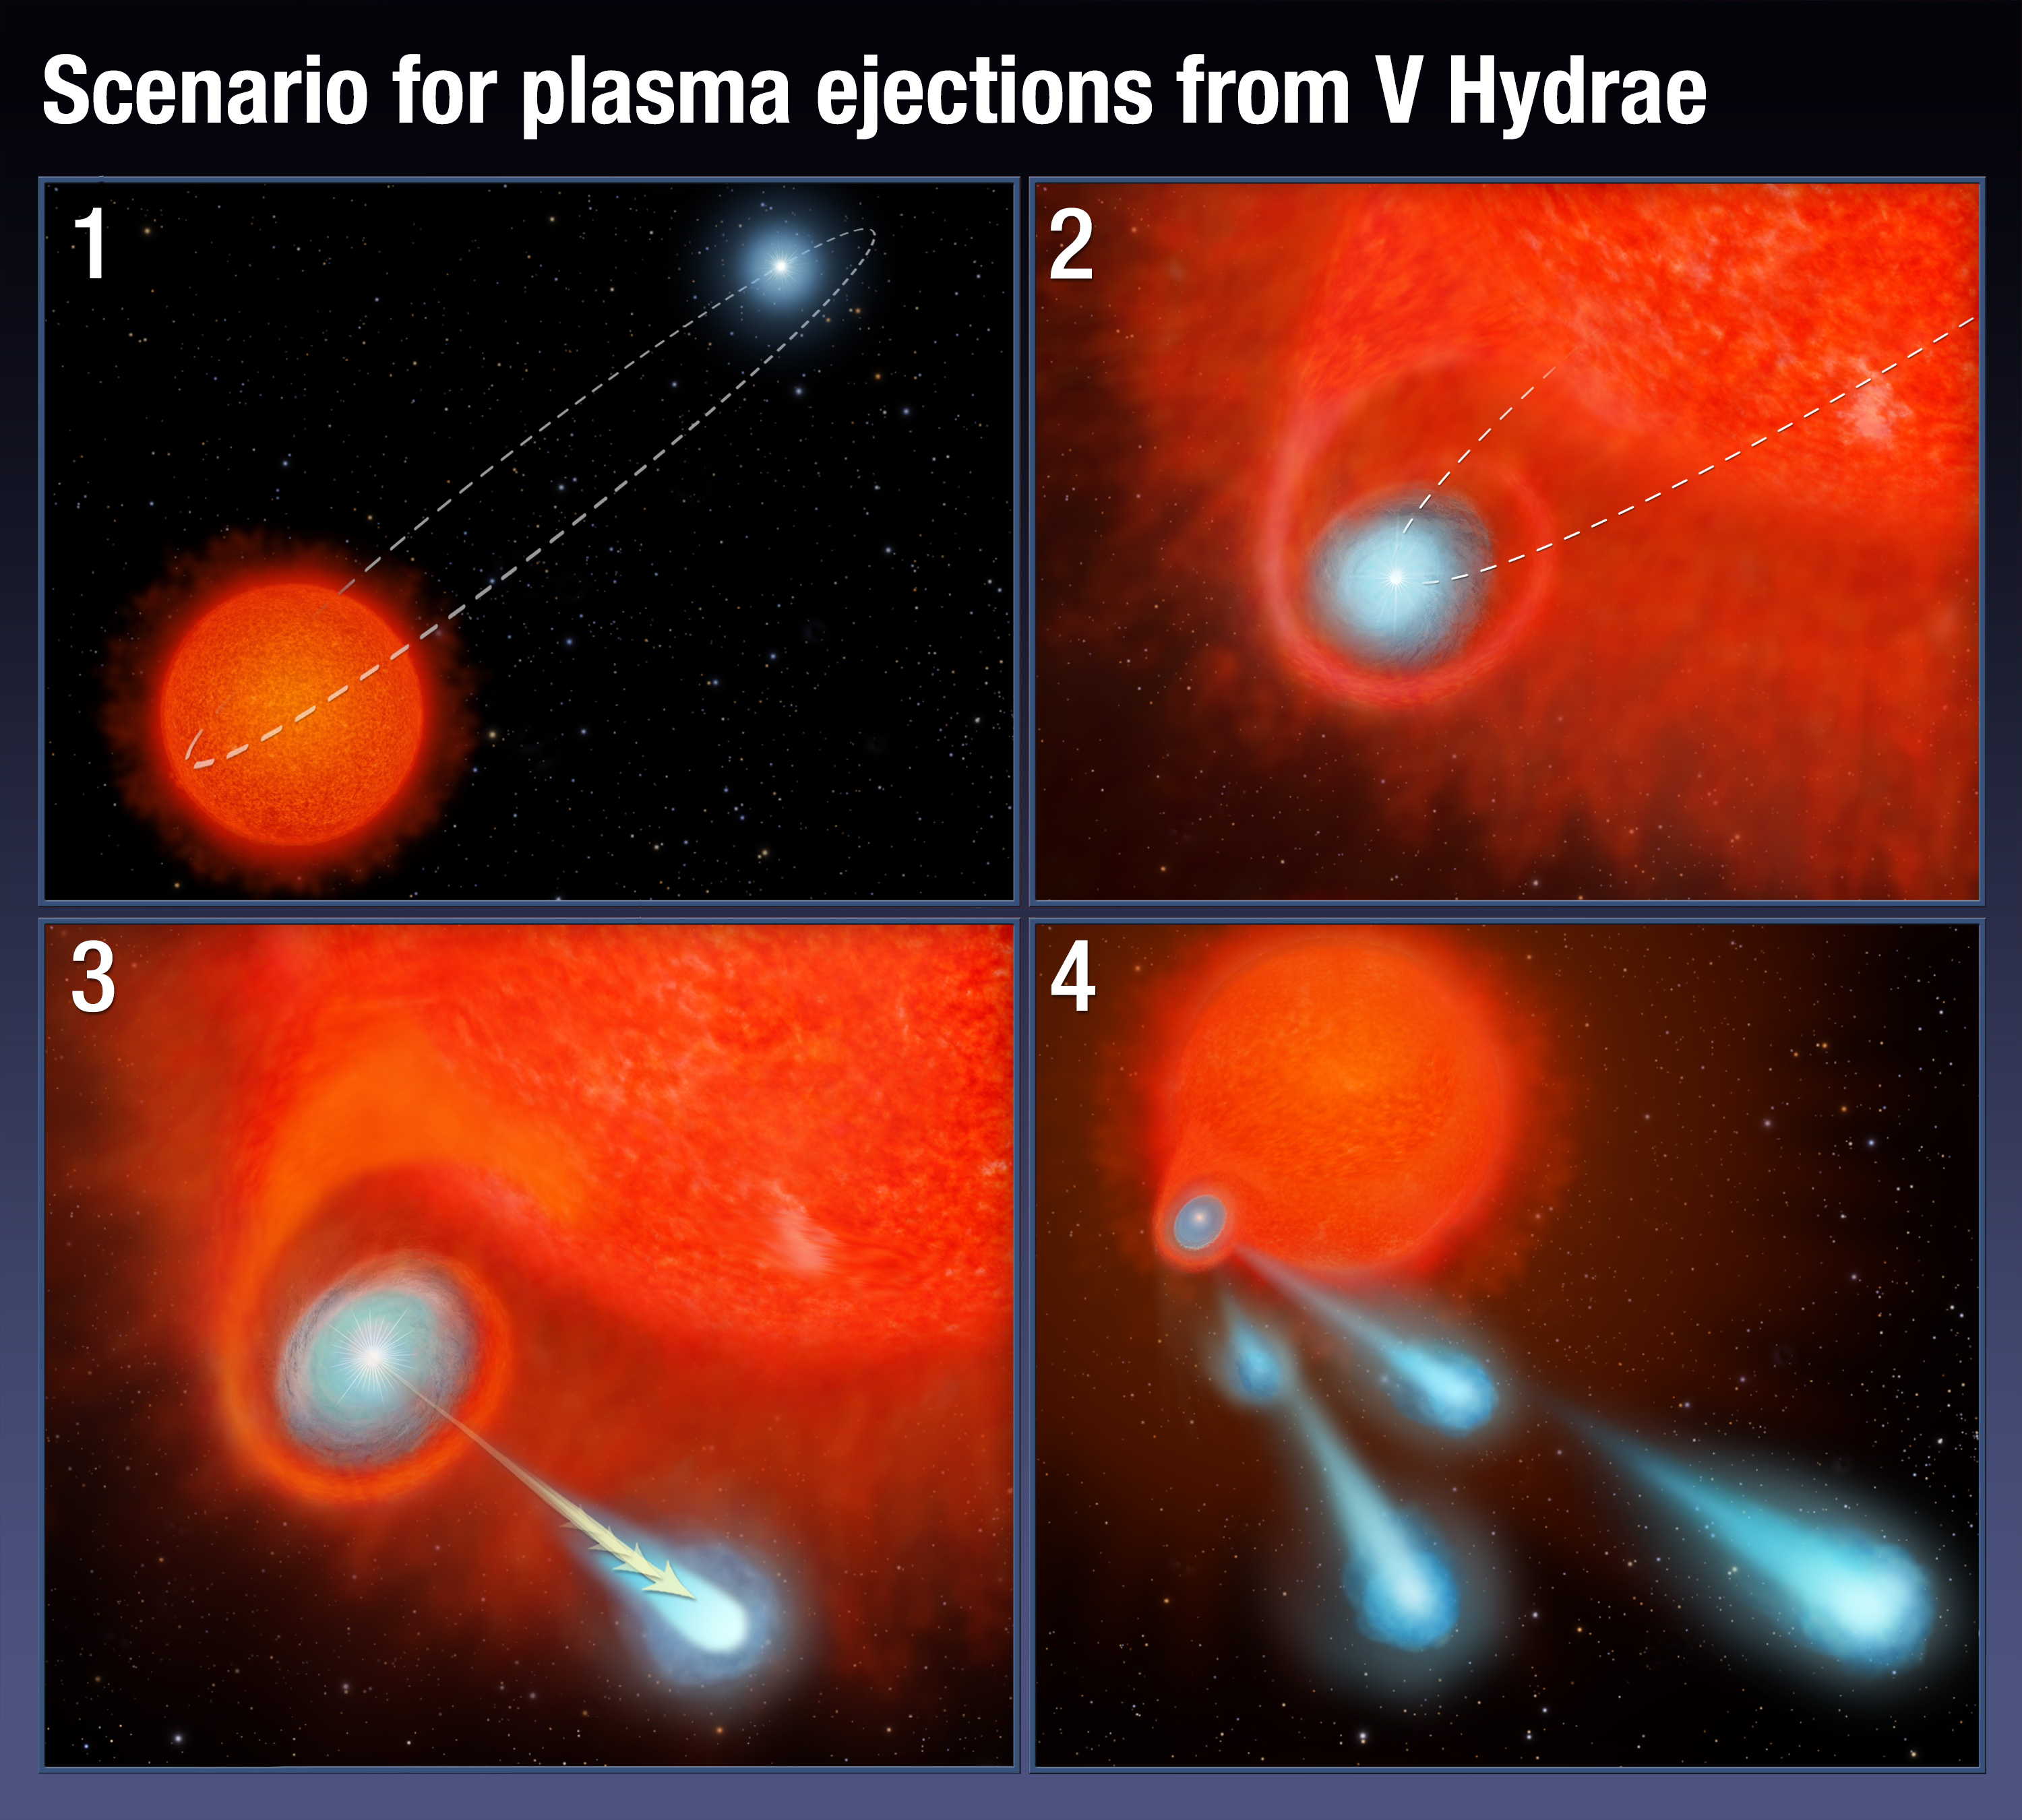

Artist's illustration of scenario for plasma ejections from V Hydrae

This four-panel graphic illustrates how the binary-star system V Hydrae is launching balls of plasma into space.

Panel 1 shows the two stars orbiting each other. One of the stars is nearing the end of its life and has swelled in size, becoming a red giant.

In panel 2, the smaller star's orbit carries the star into the red giant's expanded atmosphere. As the star moves through the atmosphere, it gobbles up material from the red giant, which settles into a disk around the star.

The buildup of material reaches a tipping point and is eventually ejected as blobs of hot plasma along the star's spin axis, shown in panel 3.

This ejection process is repeated every eight years, the time it takes for the orbiting star to make another pass through the bloated red giant's envelope, shown in panel 4.

Credit: NASA, ESA, and A. Feild (STScI)